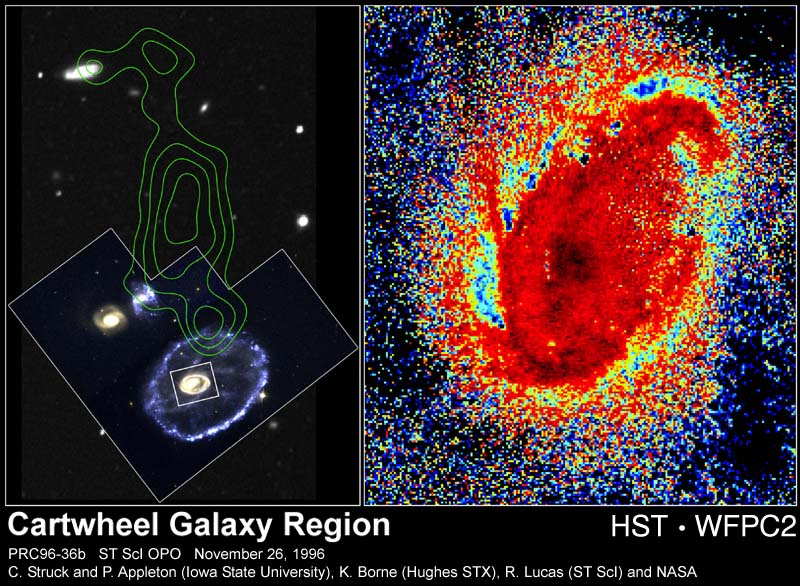

The Cartwheel Galaxy

Researchers analyzing the Hubble Space Telescope's dramatic images of the Cartwheel galaxy have discovered immense comet-like clouds of gas speeding at nearly 700, 000 mph through the galaxy's core.

Credit: Curt Struck and Philip Appleton (Iowa State University), Kirk Borne(Hughes STX Corporation), and Ray Lucas ( Space Telescope Science Institute), and NASA/ESA